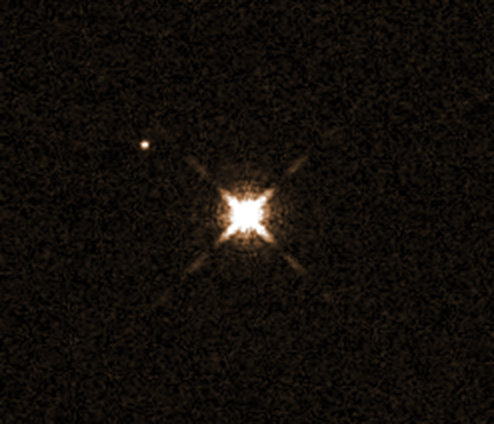

Parent star HAT-P-11

This image, taken with the NASA/ESA Hubble Space Telescope's Wide Field Camera 3, shows the star HAT-P-11.

Not visible here is a Neptune-sized planet named HAT-P-11b which orbits the star. Astronomers have discovered clear skies and steamy water vapour on the planet. It is the smallest planet ever for which water vapour has been detected.

The small bright object next to the star is not the planet in question; in fact it is not a planet at all, but another star.

The reason for the graininess in this image is that it is a very short exposure. The star itself is so bright that it is saturated, it would otherwise be a small dot like the faint star next to it. The rings and the cross are caused by the diffraction — the bouncing of light — inside the telescope.

Credit: NASA, ESA, J. Fraine